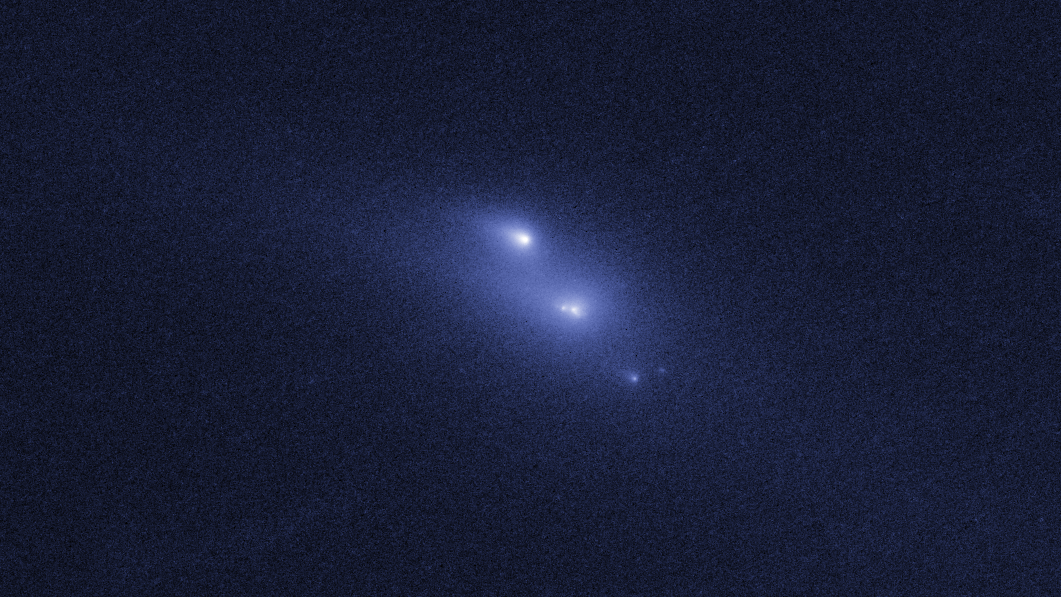

Disintegrating asteroid P/2013 R3 as viewed by Hubble on 29 October 2013

This image shows NASA/ESA Hubble Space Telescope observations of asteroid P/2013 R3. This asteroid has been found to be disintegrating and breaking apart — the first such body ever seen to do this.

This image shows P/2013 R3 as it was seen on 29 October 2013.

Credit: NASA, ESA, D. Jewitt (UCLA)